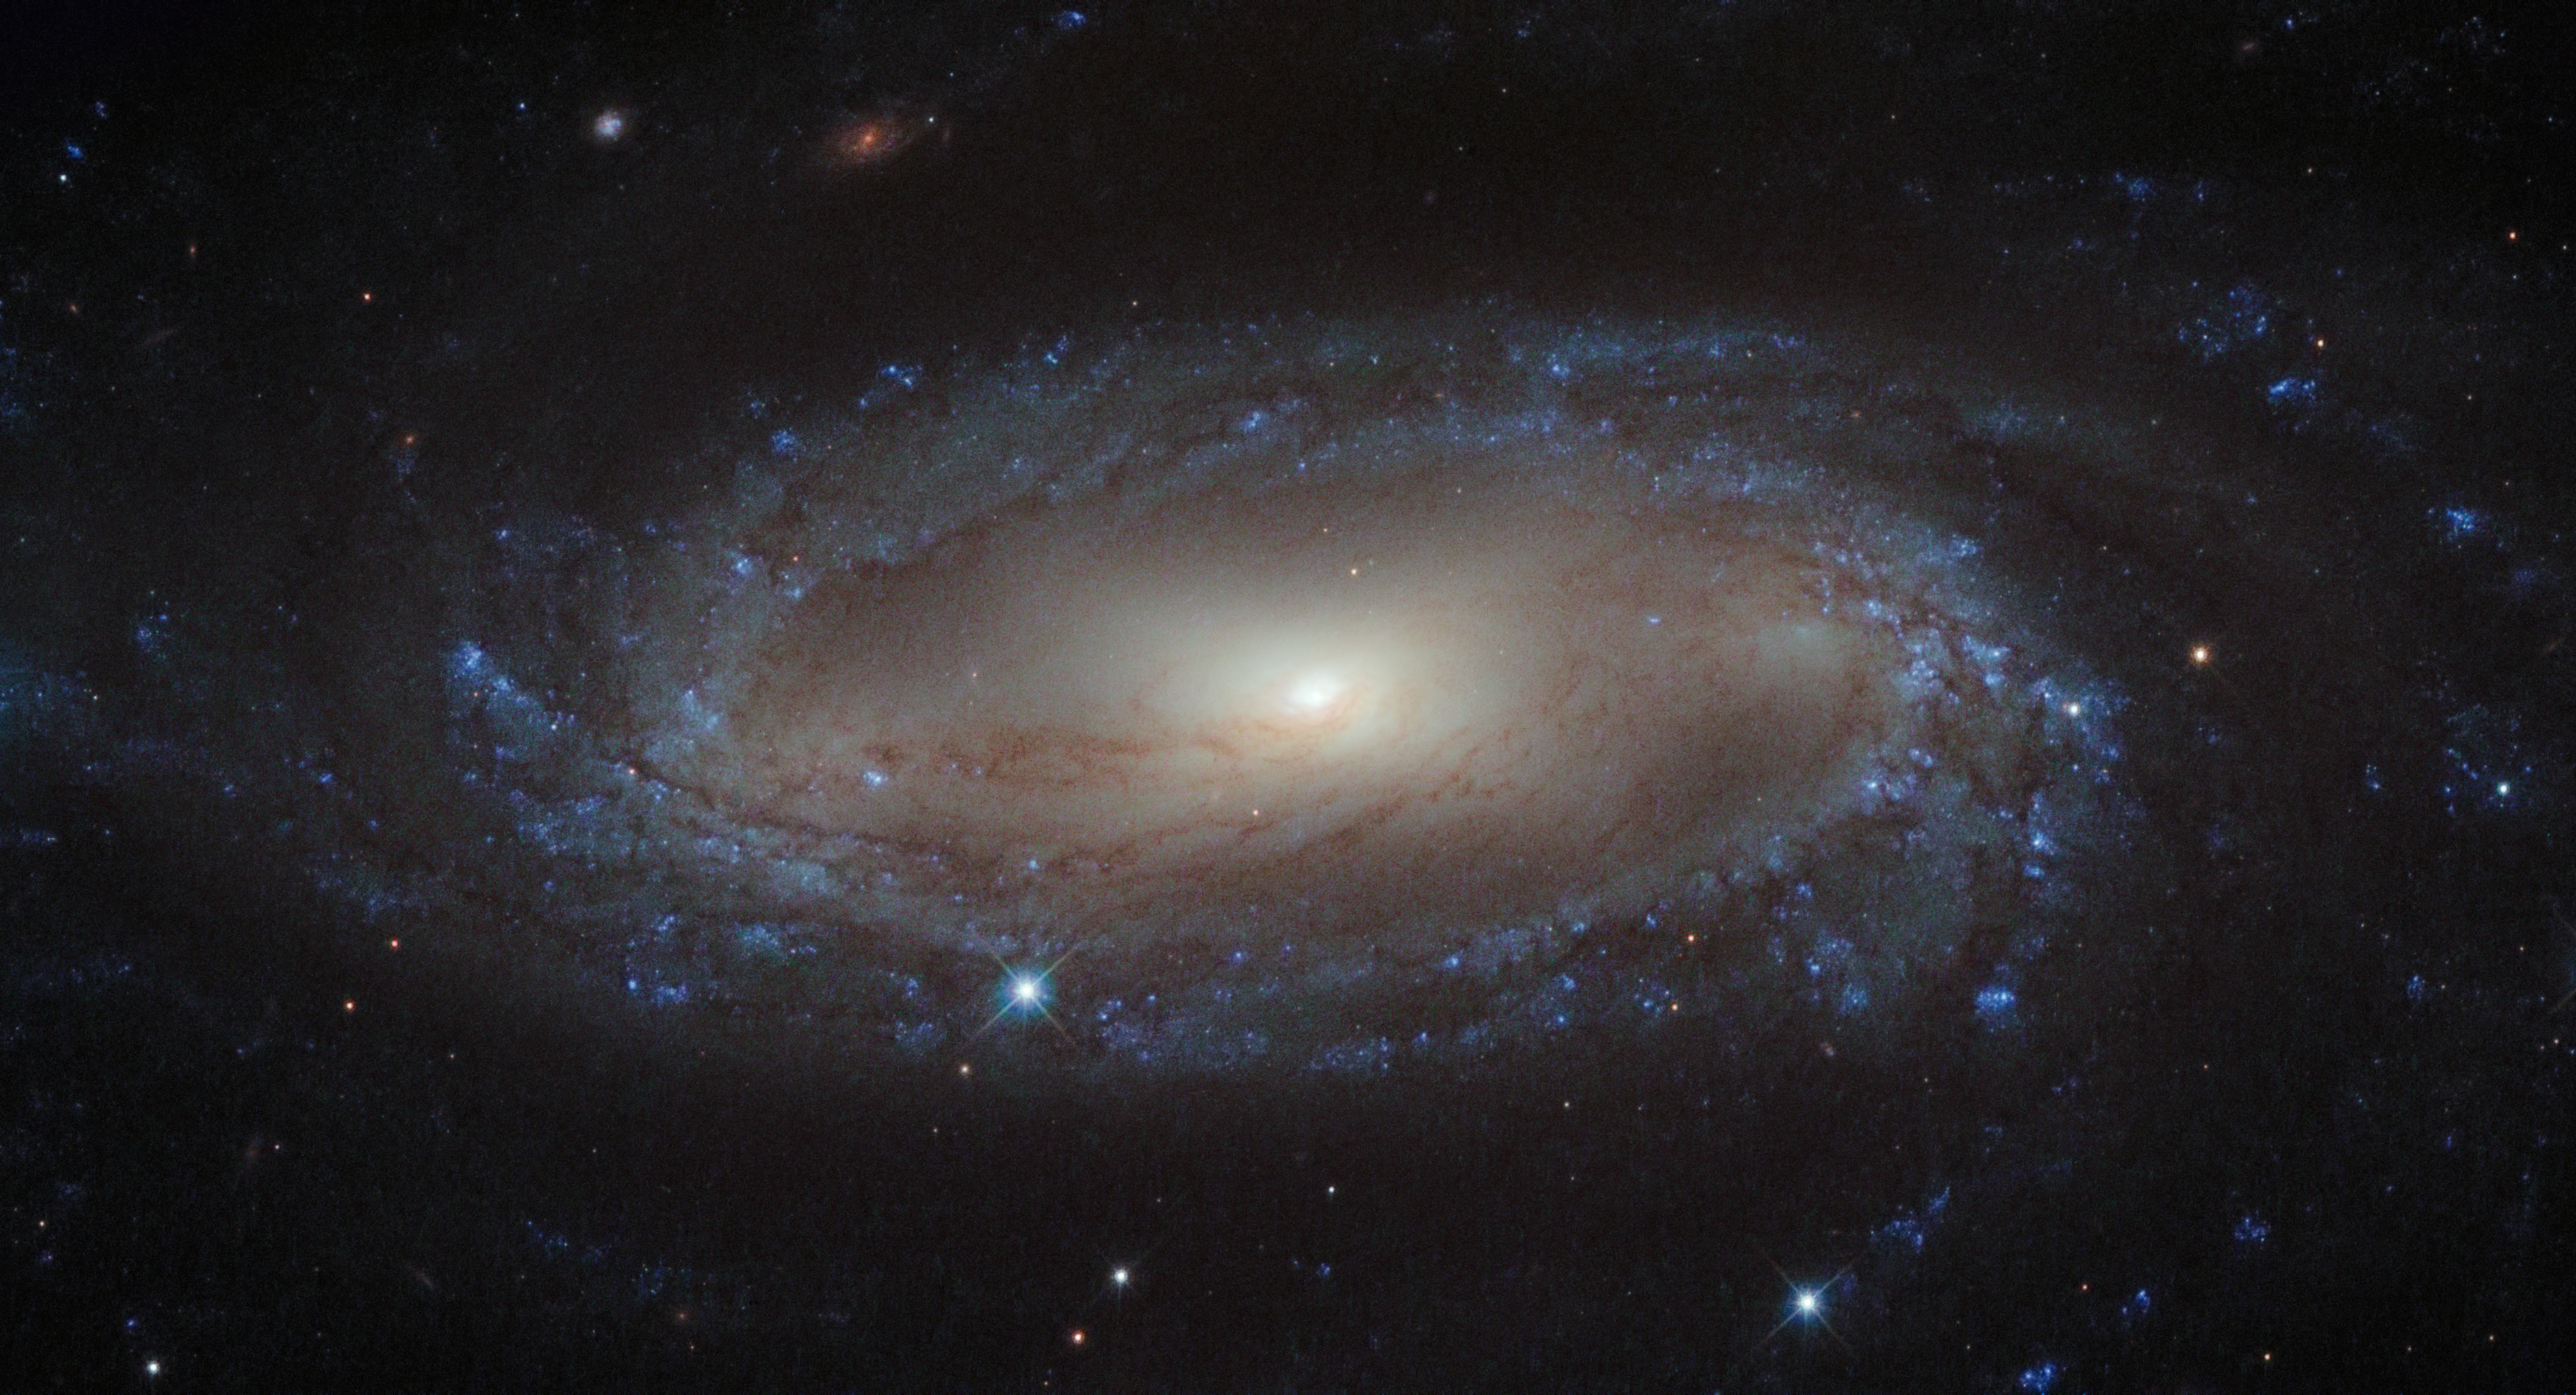

A spiral in the Air Pump

Lying over 110 million light-years away from Earth in the constellation of Antlia (The Air Pump) is the spiral galaxy IC 2560, shown here in an image from NASA/ESA Hubble Space Telescope. At this distance it is a relatively nearby spiral galaxy, and is part of the Antlia cluster — a group of over 200 galaxies held together by gravity. This cluster is unusual; unlike most other galaxy clusters, it appears to have no dominant galaxy within it.

In this image, it is easy to spot IC 2560's spiral arms and barred structure. This spiral is what astronomers call a Seyfert-2 galaxy, a kind of spiral galaxy characterised by an extremely bright nucleus and very strong emission lines from certain elements — hydrogen, helium, nitrogen, and oxygen. The bright centre of the galaxy is thought to be caused by the ejection of huge amounts of super-hot gas from the region around a central black hole.

There is a story behind the naming of this quirky constellation — Antlia was originally named antlia pneumatica by French astronomer Abbé Nicolas Louis de Lacaille, in honour of the invention of the air pump in the 17th century.

A version of this image was entered into the Hubble's Hidden Treasures image processing competition by contestant Nick Rose.

Credit: ESA/Hubble & NASA Acknowledgement: Nick Rose